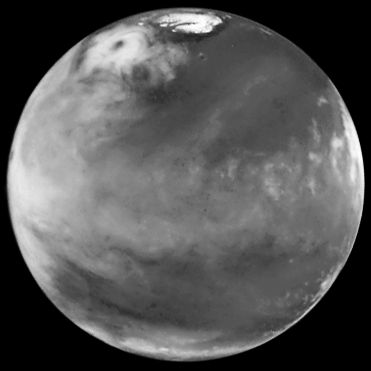

Hubble Views Collossal Polar Cyclone on Mars

The discovery image of the Martian polar storm as seen in blue light (410 nm). The storm is located near 65 deg. N latitude and 85 deg. W longitude, and is more than 1000 miles (1600 km) across. The residual north polar water ice cap is at top. A belt of clouds like that seen in previous telescopic observations during this Martian season can also be seen in the planet's equatorial regions and northern mid-latitudes, as well as in the southern polar regions. The volcano Ascraeus Mons can be seen as a dark spot poking above the cloud deck near the western (morning) limb; this extinct volcano towers nearly 16 miles (25 km) above the surrounding plains, and is about 250 miles (400 km) across.

Credit: Jim Bell (Cornell U.), Steve Lee (U. Colorado), Mike Wolff (SSI), andNASA/ESA